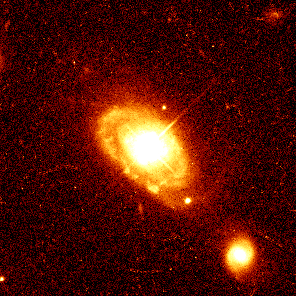

Quasar PG 0052+251

This image shows quasar PG 0052+251, which is 1.4 billion light-years from Earth, at the core of a normal spiral galaxy. Astronomers are surprised to find host galaxies, such as this one, that appear undisturbed by the strong quasar radiation.

Credit: John Bahcall (Institute for Advanced Study, Princeton) Mike Disney (University of Wales) and NASA/ESA